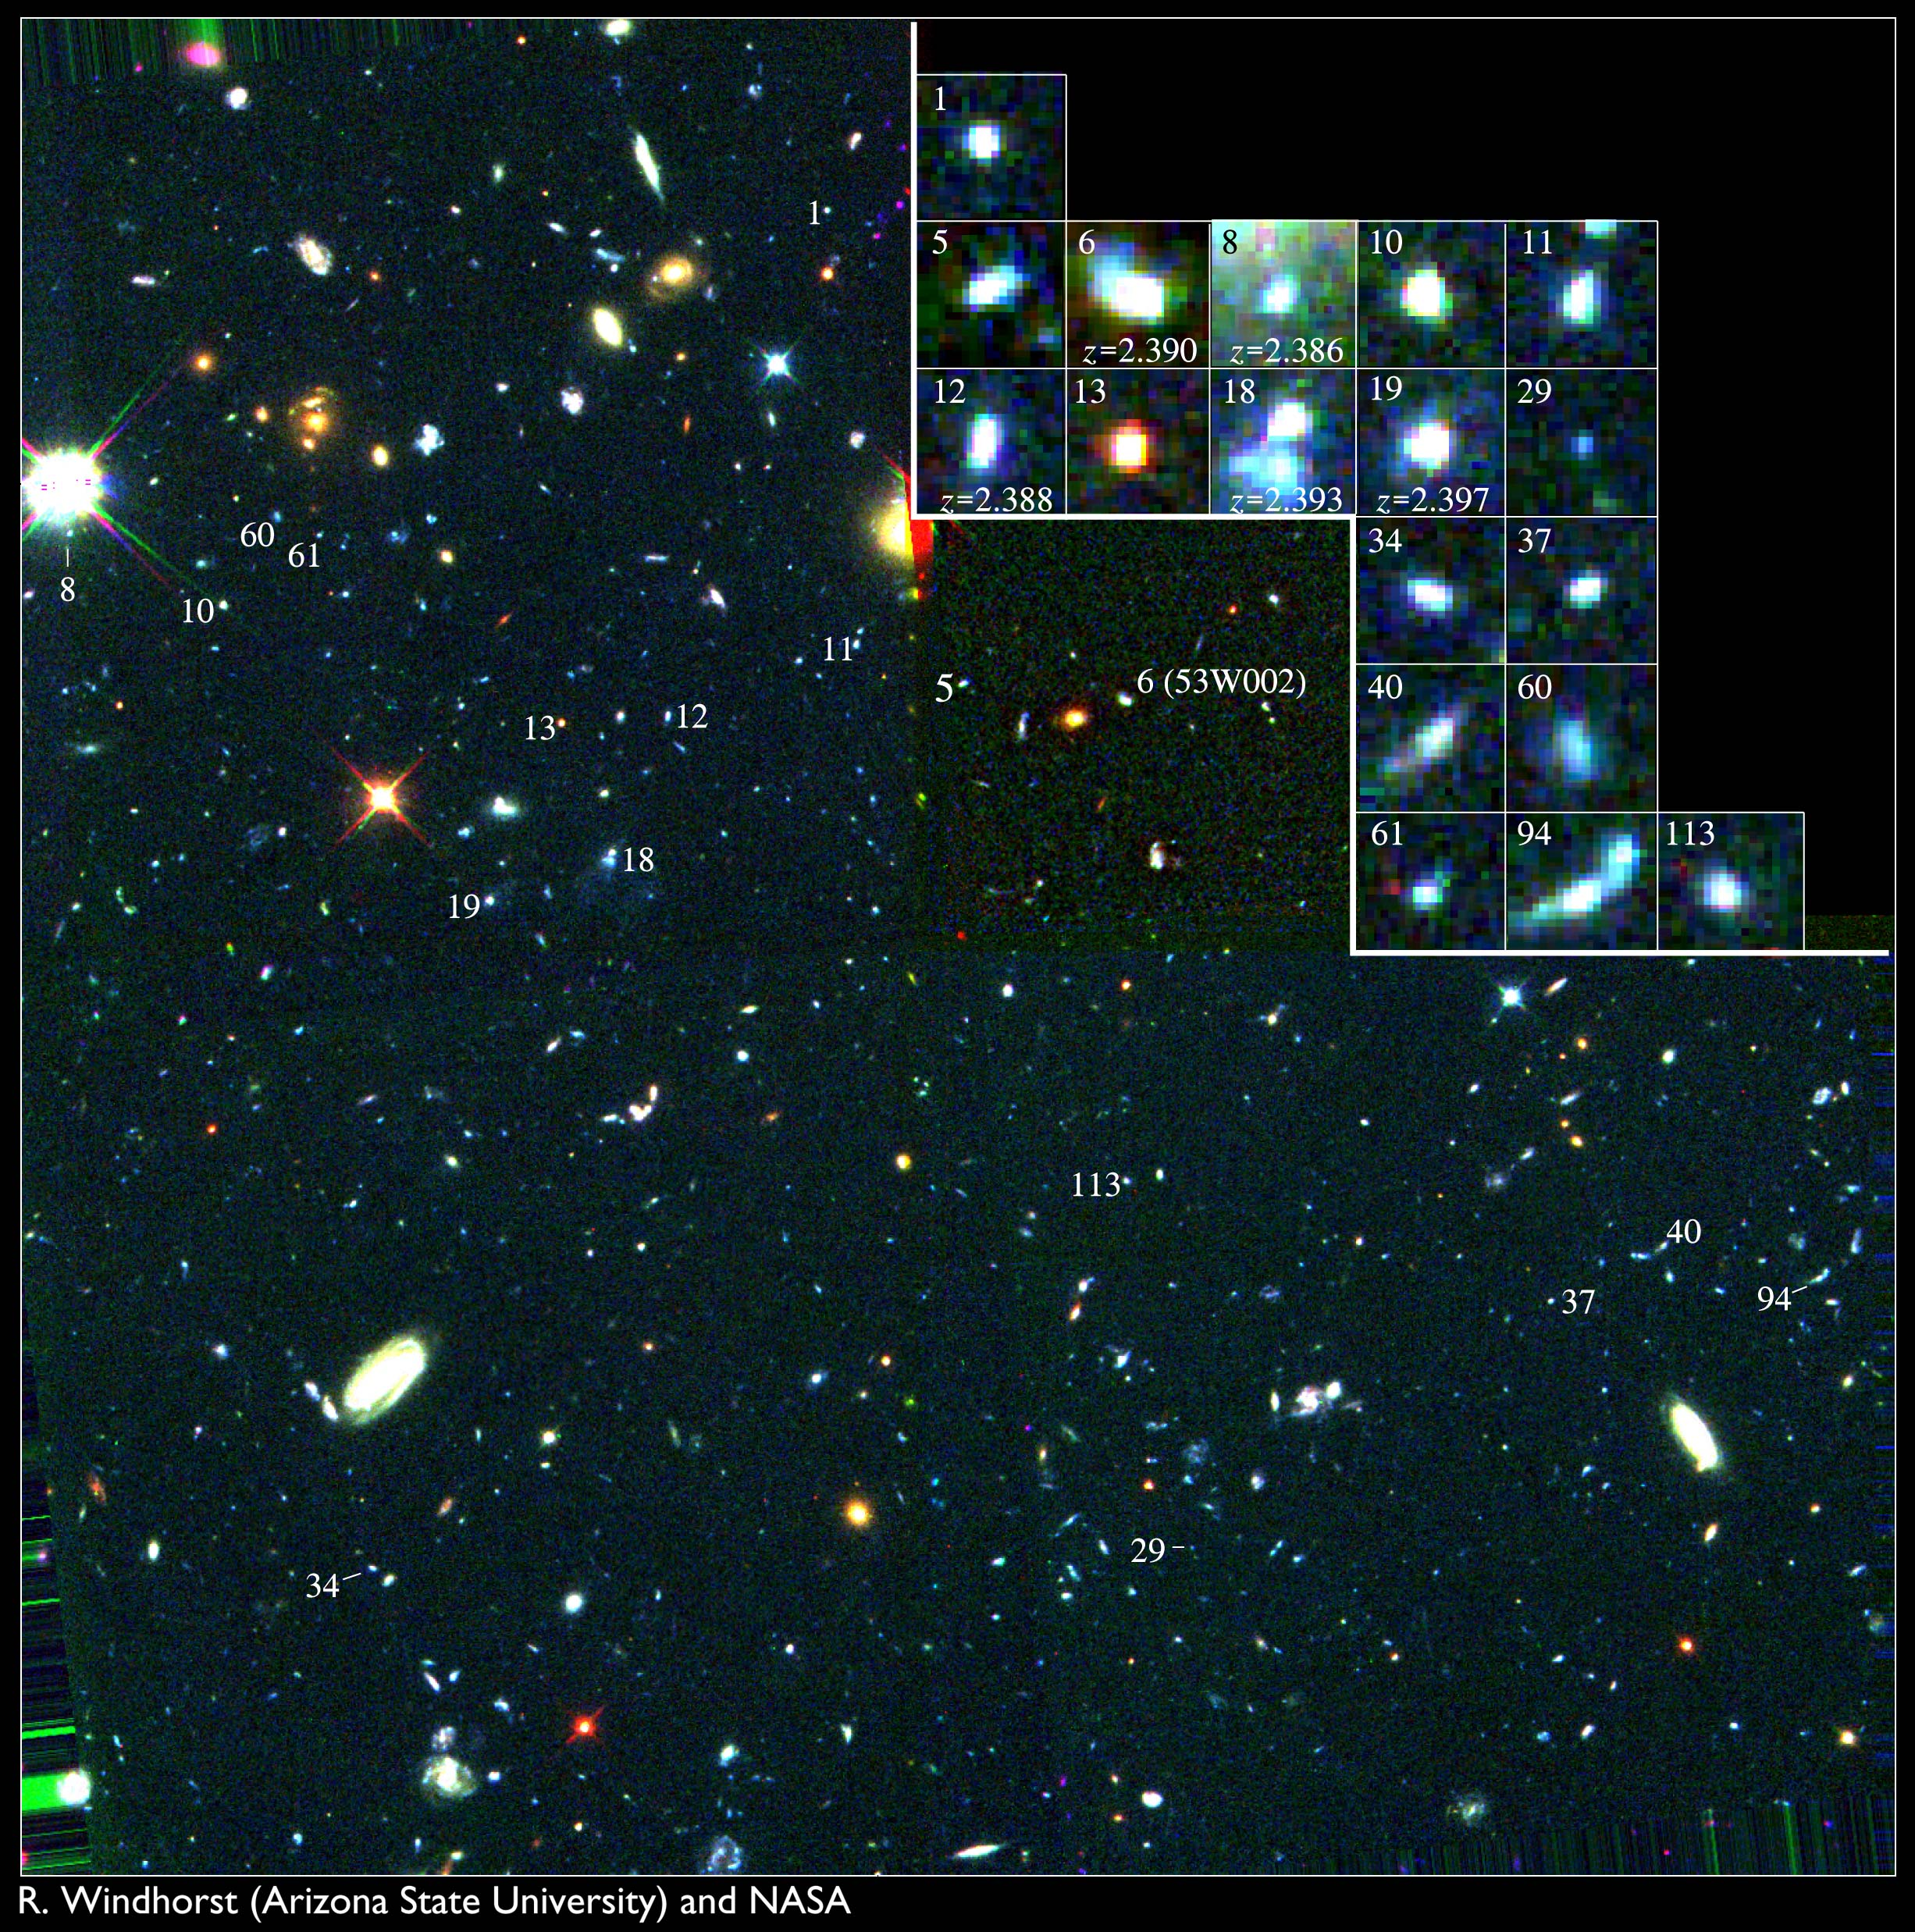

Key to Location of Galactic Building Blocks in Hubble Field

The boxes in this colour image identify 18 sub-galactic sized objects in a Hubble Space Telescope survey of faint galaxies.

Credit: Rogier Windhorst (Arizona State University)